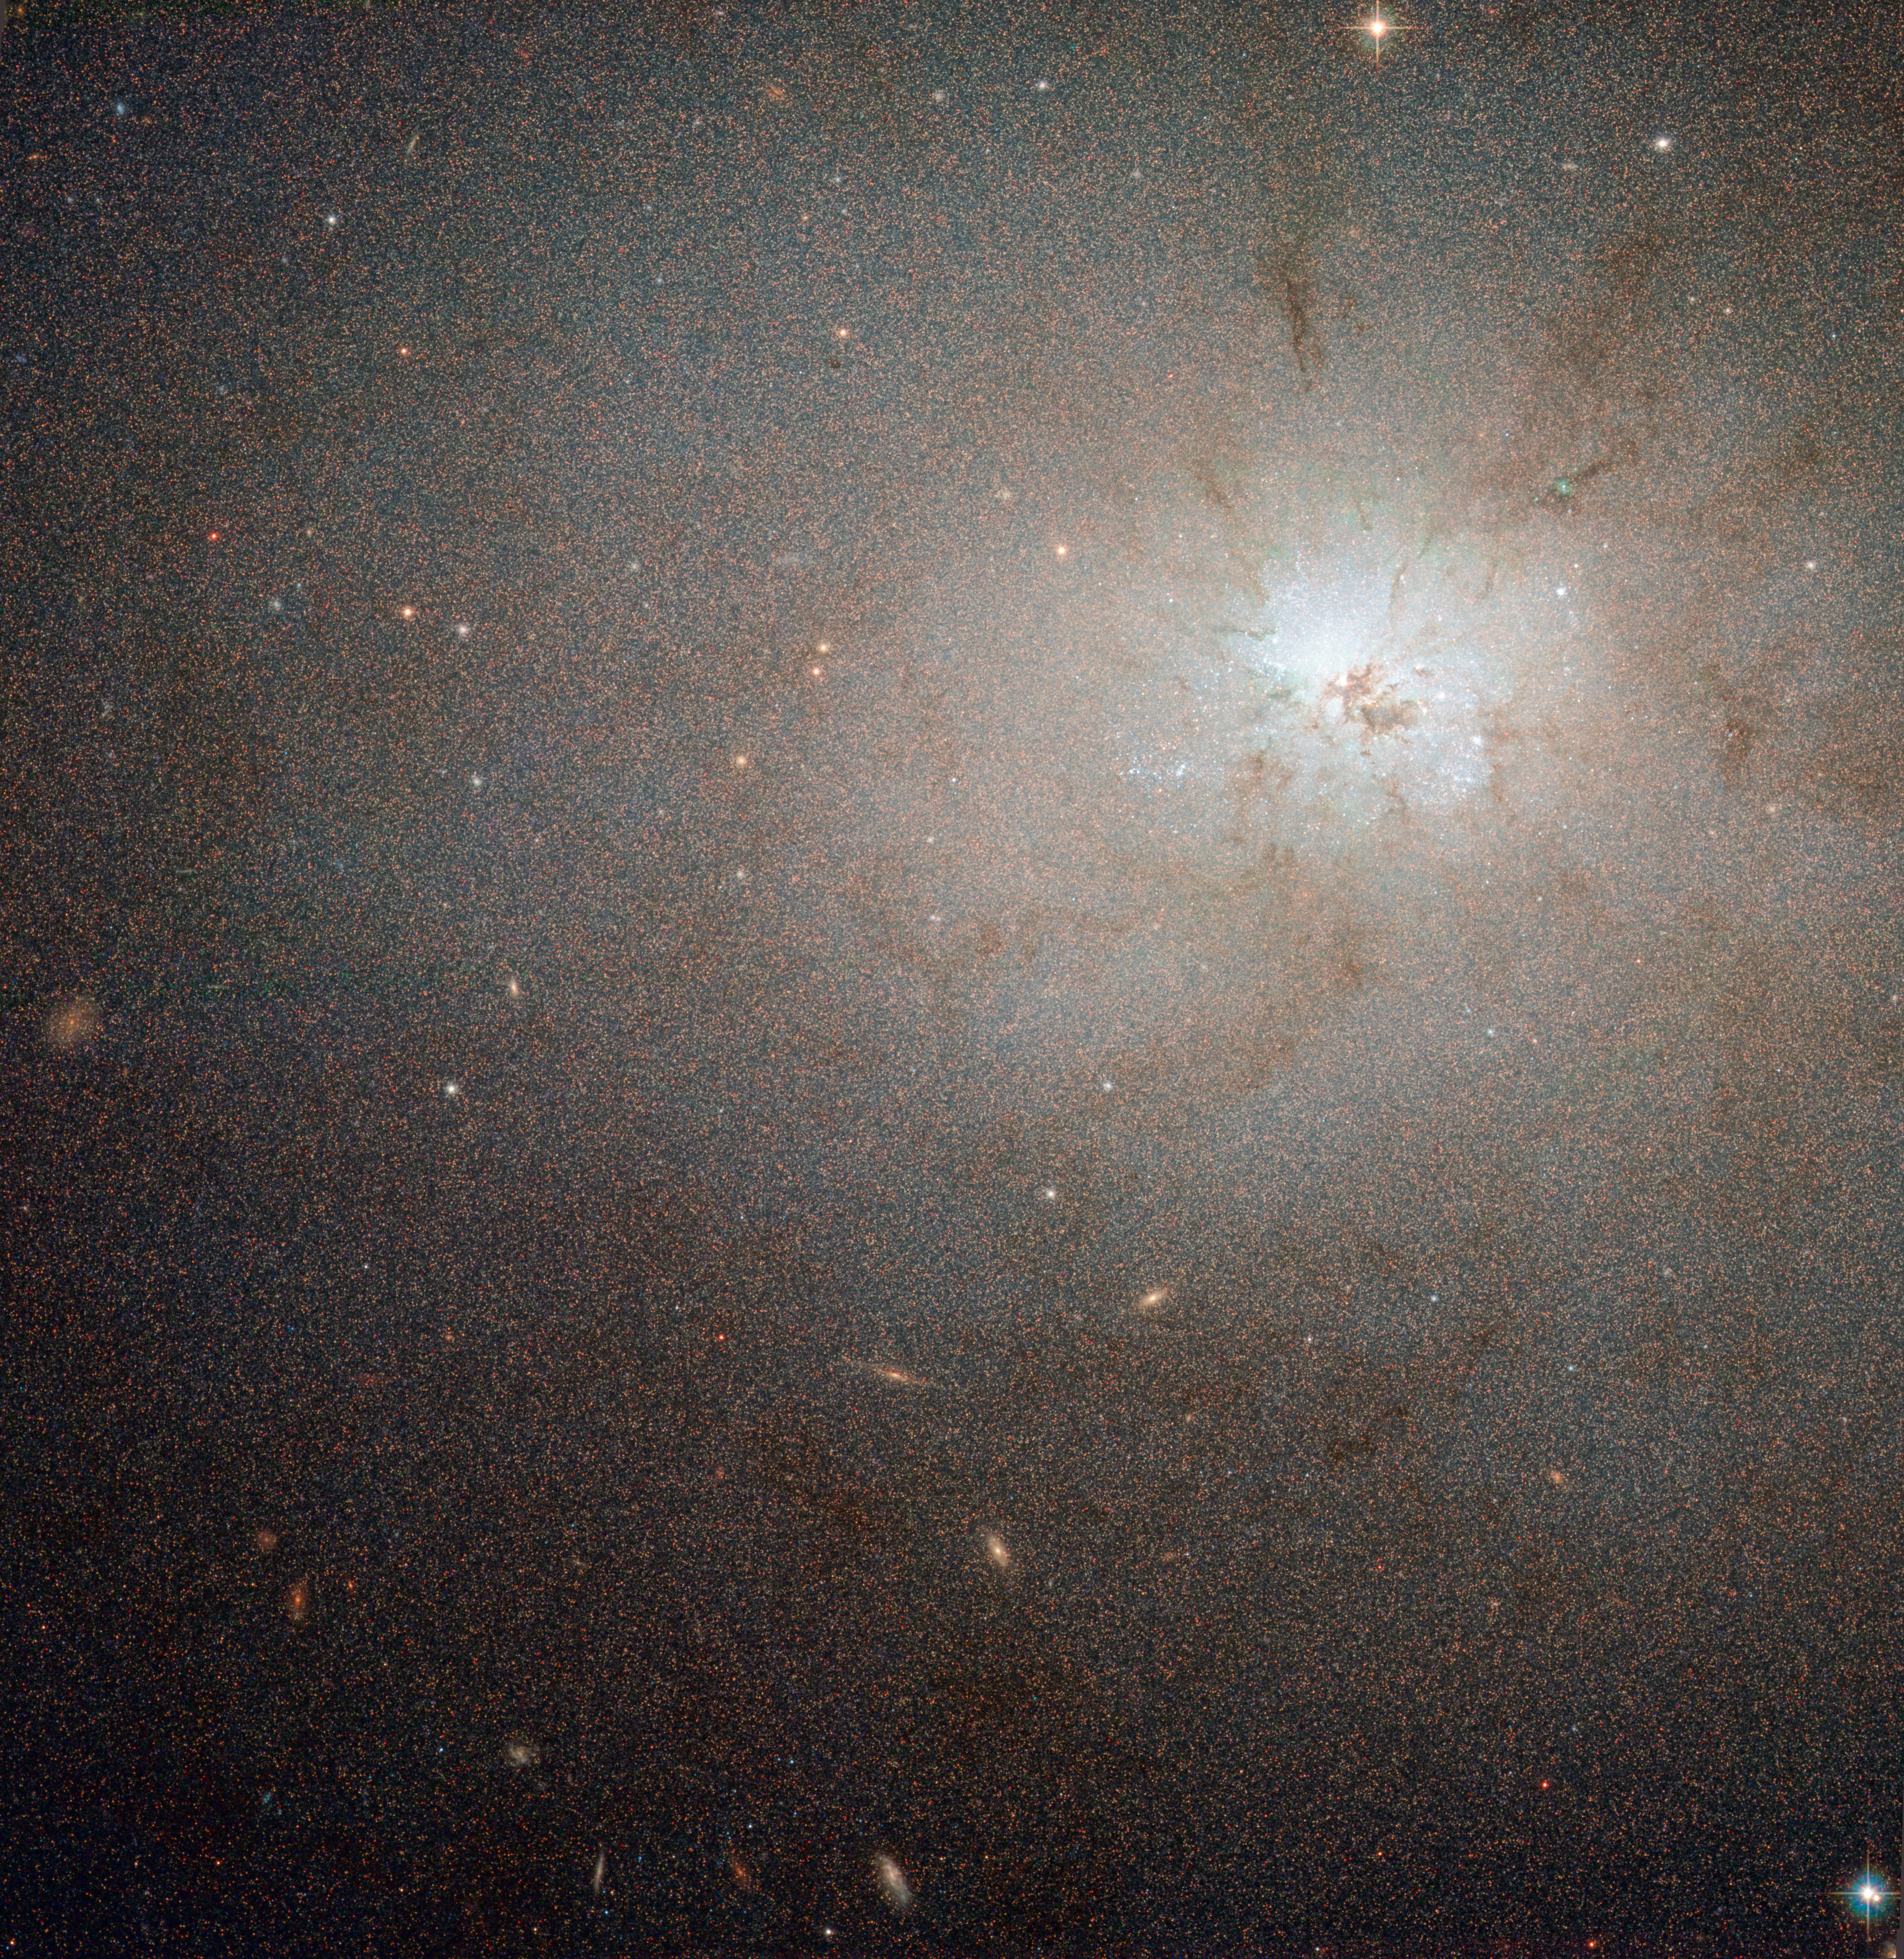

A deceptively quiet galaxy

At first glance NGC 3077 looks like a typical, relatively peaceful elliptical galaxy. However, as this NASA/ESA Hubble Space Telescope image dramatically reveals it is actually a hotbed of very energetic star formation and the whole galaxy is laced with dusty tendrils. It lies about 13 million light-years from Earth.

NGC 3077 was first seen by William Herschel with his 47 cm telescope in England in 1801, when he was close to completing his sky surveys. It is located in the far northern sky in the constellation of Ursa Major (the Great Bear) and forms a triplet with two brighter nearby galaxies, the graceful spiral Messier 81 and the very peculiar and active starburst galaxy Messier 82.

Although overshadowed by its brighter neighbours, NGC 3077 is also very active and resembles a less dramatic version of Messier 82. Interactions between the three galaxies have stoked the fires of star formation in the core of the galaxy and the brilliant glow of many huge young star clusters at the centre of NGC 3077 dominates the Hubble image. If you look closely you can see vast numbers of individual stars in the galaxy across the entire image, as well as several, much more remote, galaxies seen through the much closer NGC 3077.

This picture was created from images taken using the Wide Field Channel on Hubble’s Advanced Camera for Surveys. It was made from images through blue (F475W, coloured blue), orange (F606W, coloured green) and near-infrared (F814W, coloured red) filters. The exposure times were about 27 minutes per filter. The field of view extends over about 3.3 arcminutes.

Credit: ESA/Hubble & NASA